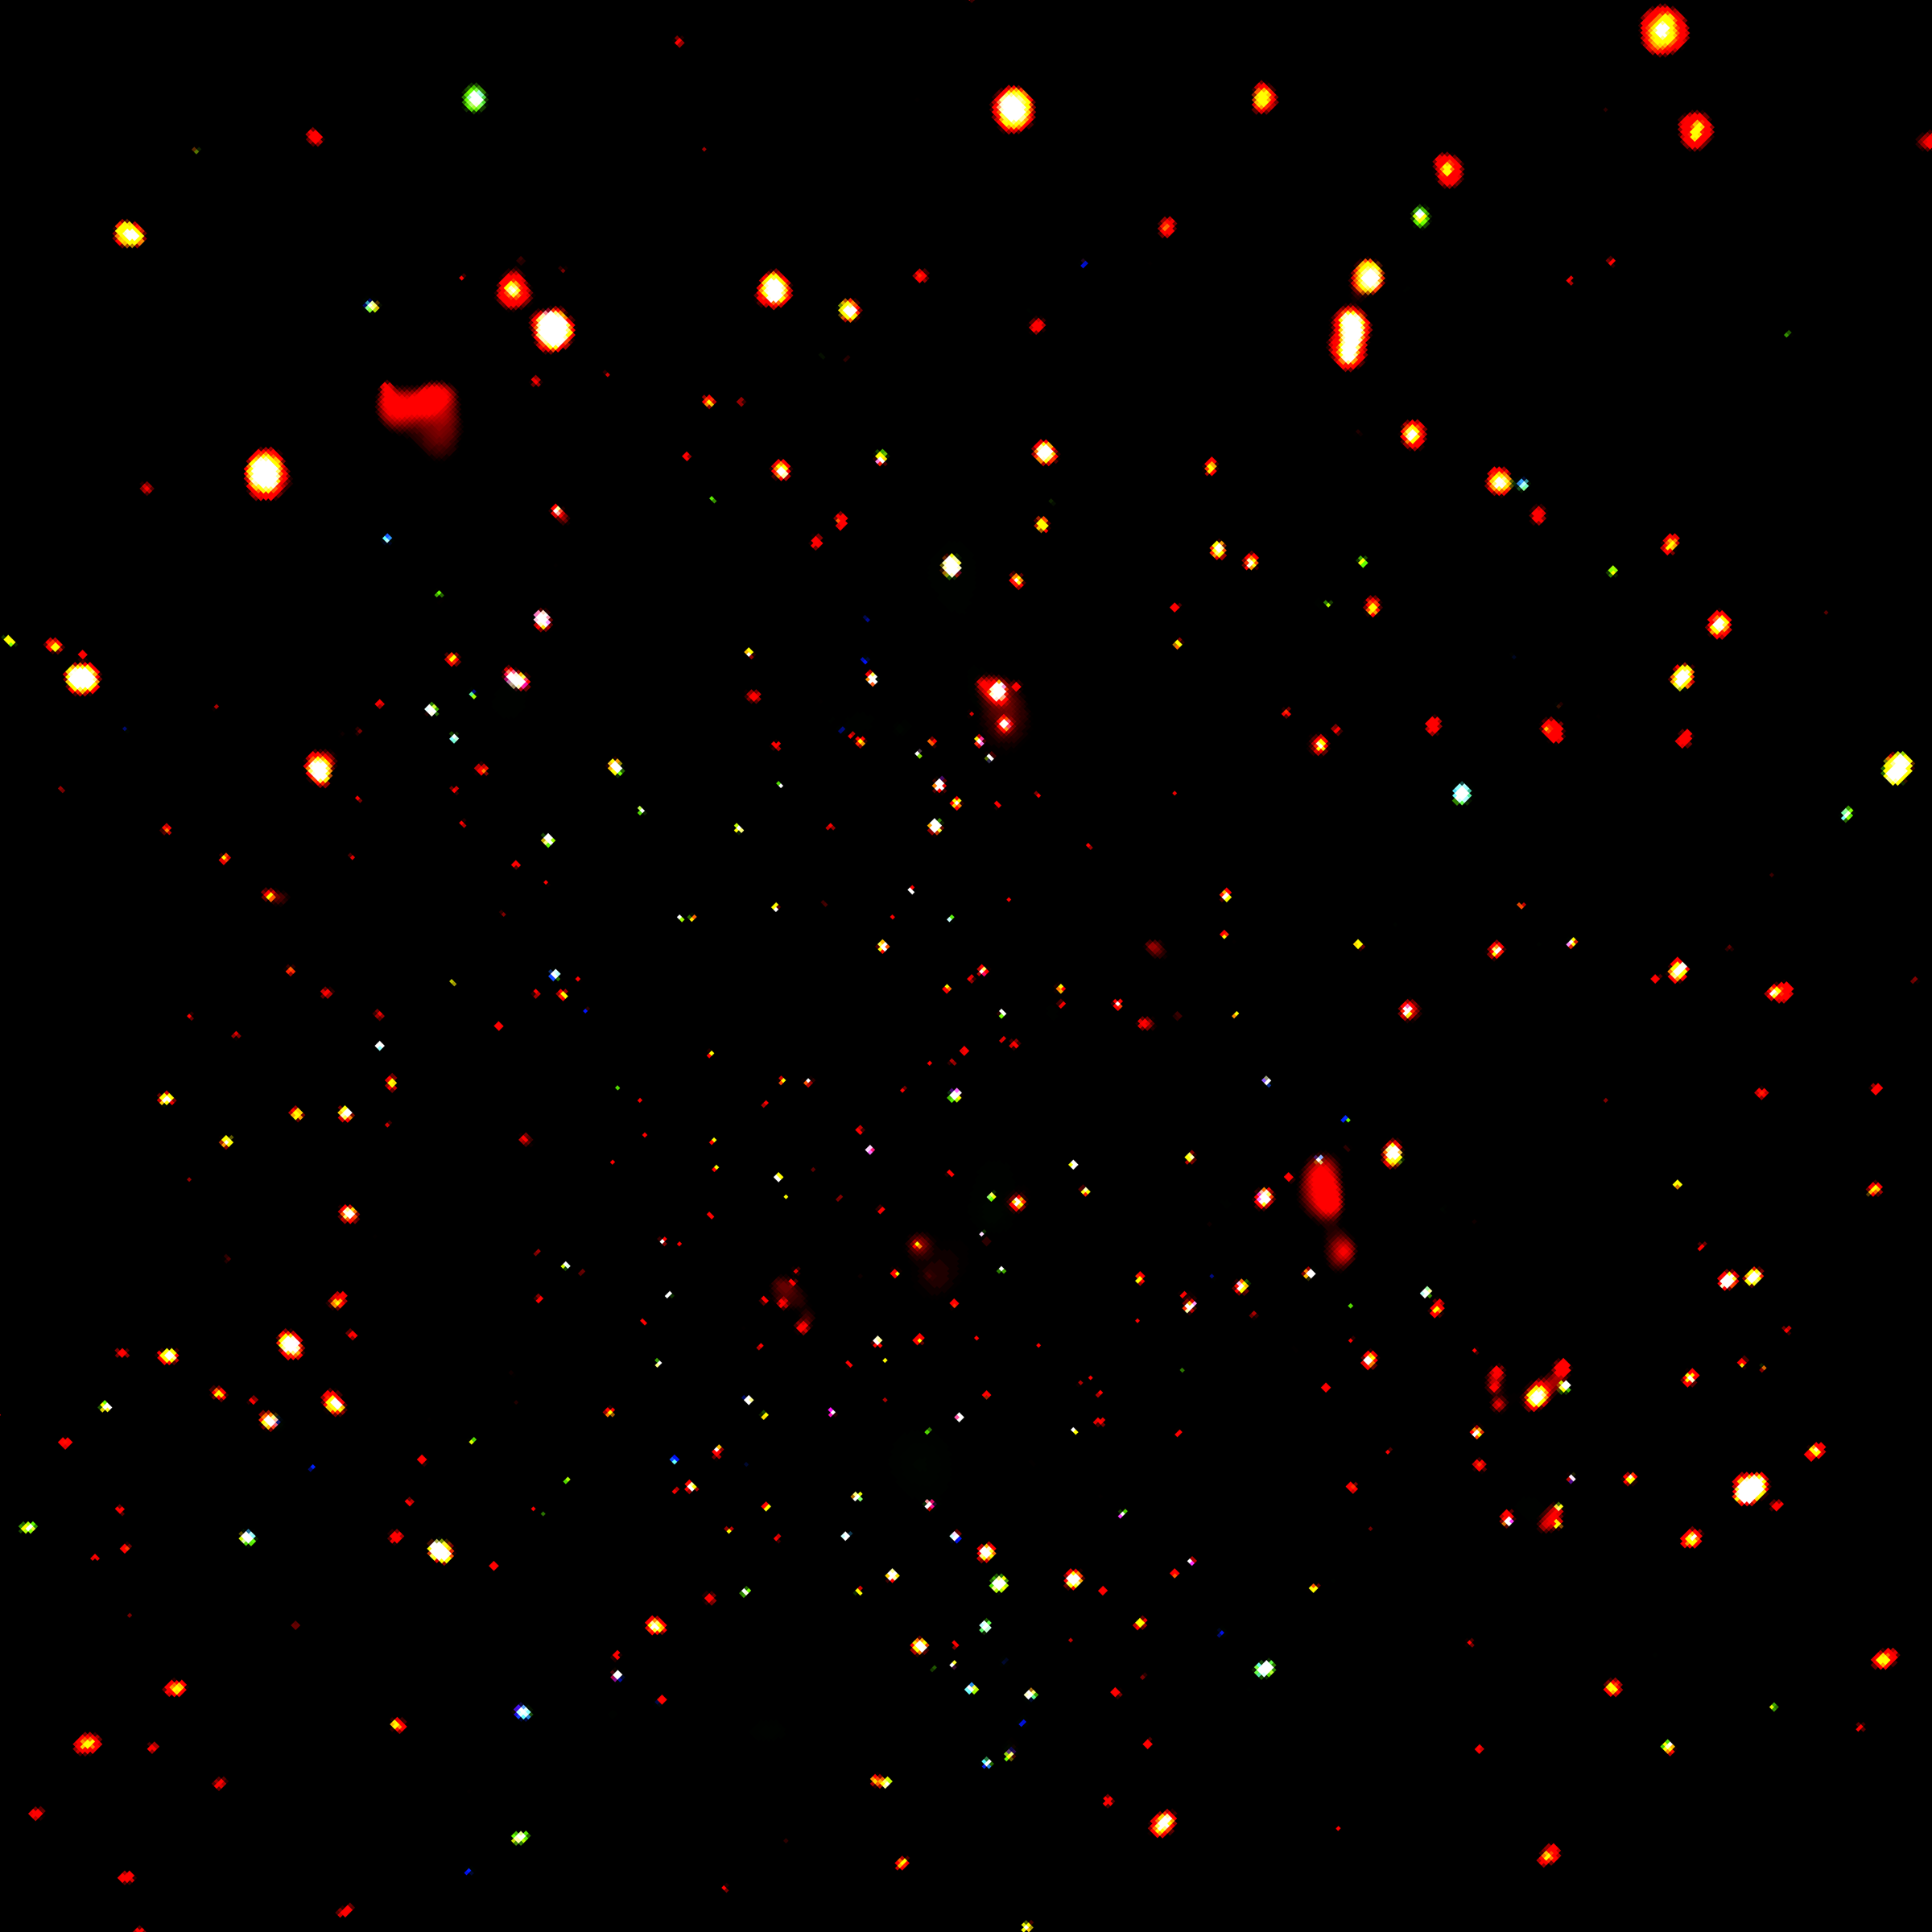

Chandra Deep Field-North

The Chandra Deep Field-North image was made by observing an area of the sky over half the size of the full moon for 23 days. It is the most sensitive or "deepest" X-ray exposure ever made. By combining the Chandra and Hubble data for this field, astronomers can take a census of the fraction of young galaxies that contain active supermassive black holes back to a time when the universe was only about one billion years old, less than 10 percent of its present age. The data show that these very distant supermassive black holes are rare, more so than some expected.

Credit: NASA/ESA/CXC/Penn State/D.M. Alexander, F.E. Bauer, W.N. Brandt et al.